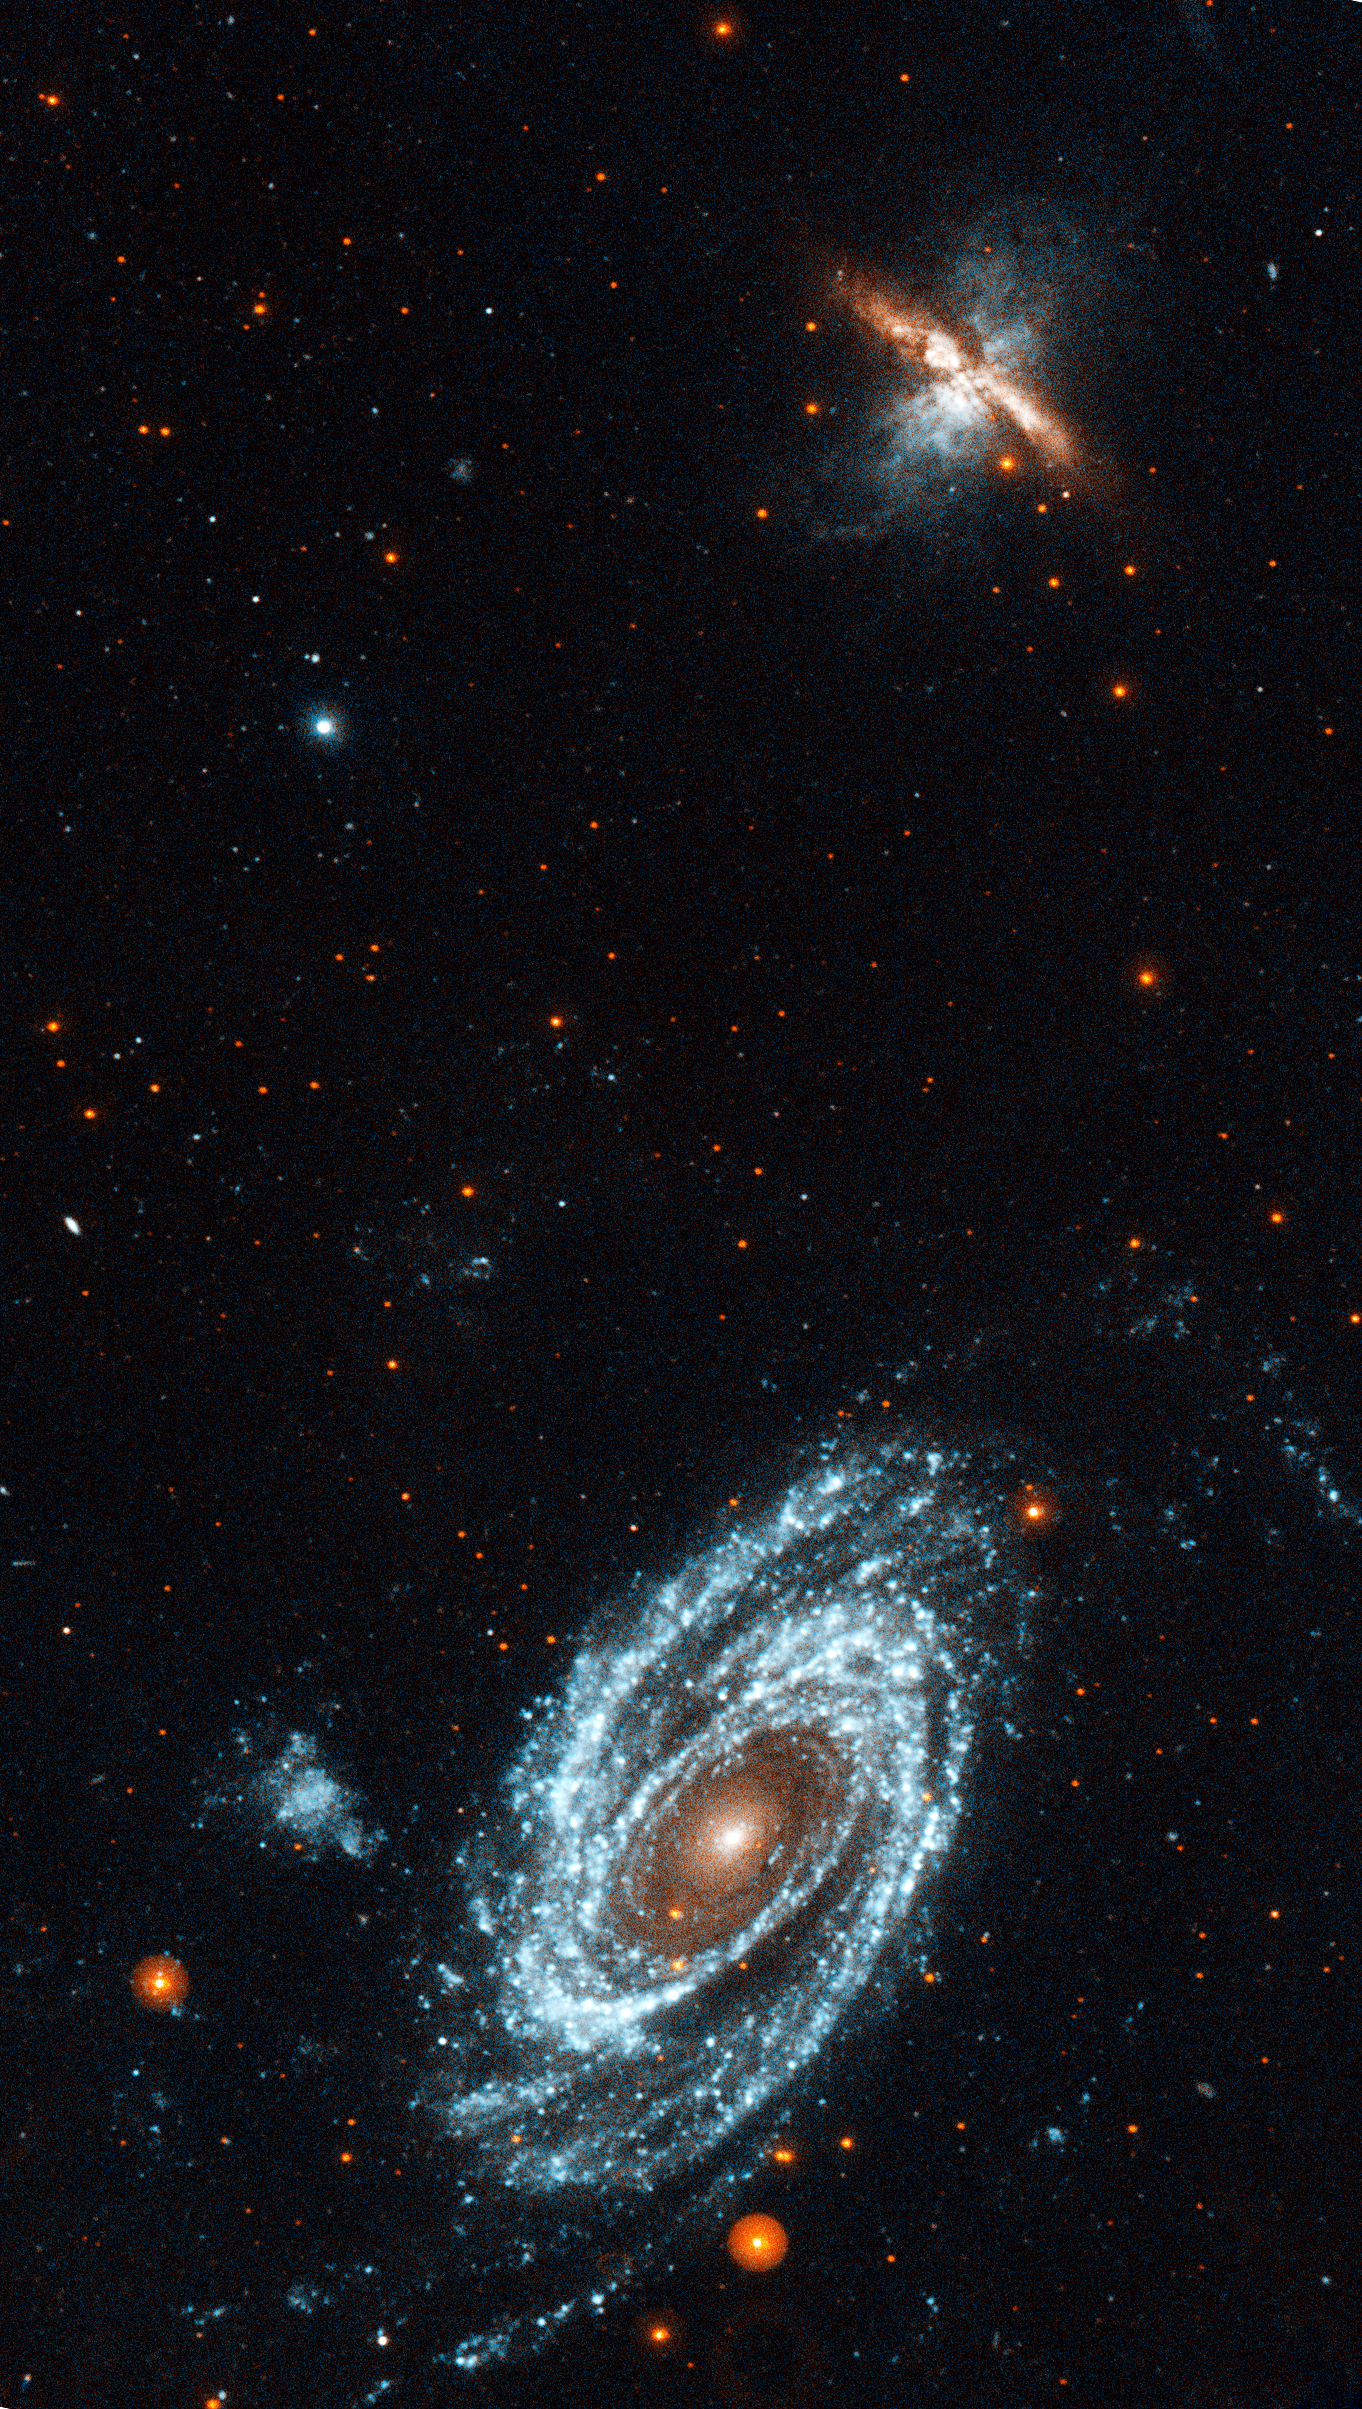

GALEX ultraviolet image of the interacting galaxies M81 and M82

A GALEX ultraviolet image of the interacting galaxies M81 and M82, which lie 12 million light-years away in the constellation Ursa Major. The gravity from each galaxy dramatically affected the other during their last close encounter, 200 million years ago. Gas density waves rippling around M81 make it a grand design spiral. M82 is undergoing a starburst at its core, creating glowing fingers of hydrogen.

Credit: NASA, ESA, and D. de Mello (Catholic University of America/GSFC) & NASA/GALEX